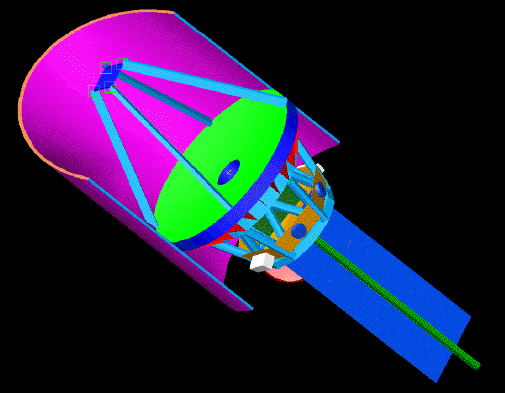

Lockheed-Martin design

This Lockheed-Martin design emphasizes simplicity and features a monolithic, 20-foot-wide (6 meters) primary mirror and rings of metal shields. The telescope would be launched into a highly elliptical orbit around the Sun. The elliptical orbit would take the telescope beyond Mars and almost to the inner portions of the asteroid belt. At this distance from the Sun, scattered sunlight and infrared light from dust in our solar system is 10 to 30 times dimmer than what is seen by orbiting spacecraft near Earth. The large deployable solar array is required to provide sufficient power for the spacecraft and communications when it is far

Credit: Lockheed-Martin